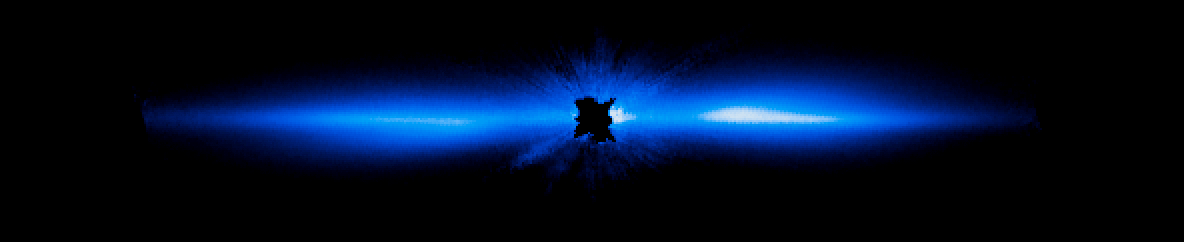

Hubble's View of Beta Pictoris in 2012

Astronomers have used the NASA/ESA Hubble Space Telescope to take the most detailed picture to date of a large, edge-on, gas-and-dust disc encircling the 20-million-year-old star Beta Pictoris. Beta Pictoris remains the only directly imaged debris disc that has a giant planet (discovered in 2009). Because the orbital period is comparatively short (estimated to be between 18 and 22 years), astronomers can see large motion in just a few years. This allows scientists to study how the Beta Pictoris disc is distorted by the presence of a massive planet embedded within the disc. This 2012 visible-light Hubble image traces the disc to within about 1050 million kilometres of the star (which is inside the radius of Saturn's orbit about the Sun).

Credit: NASA, ESA, D. Apai and G. Schneider (University of Arizona)